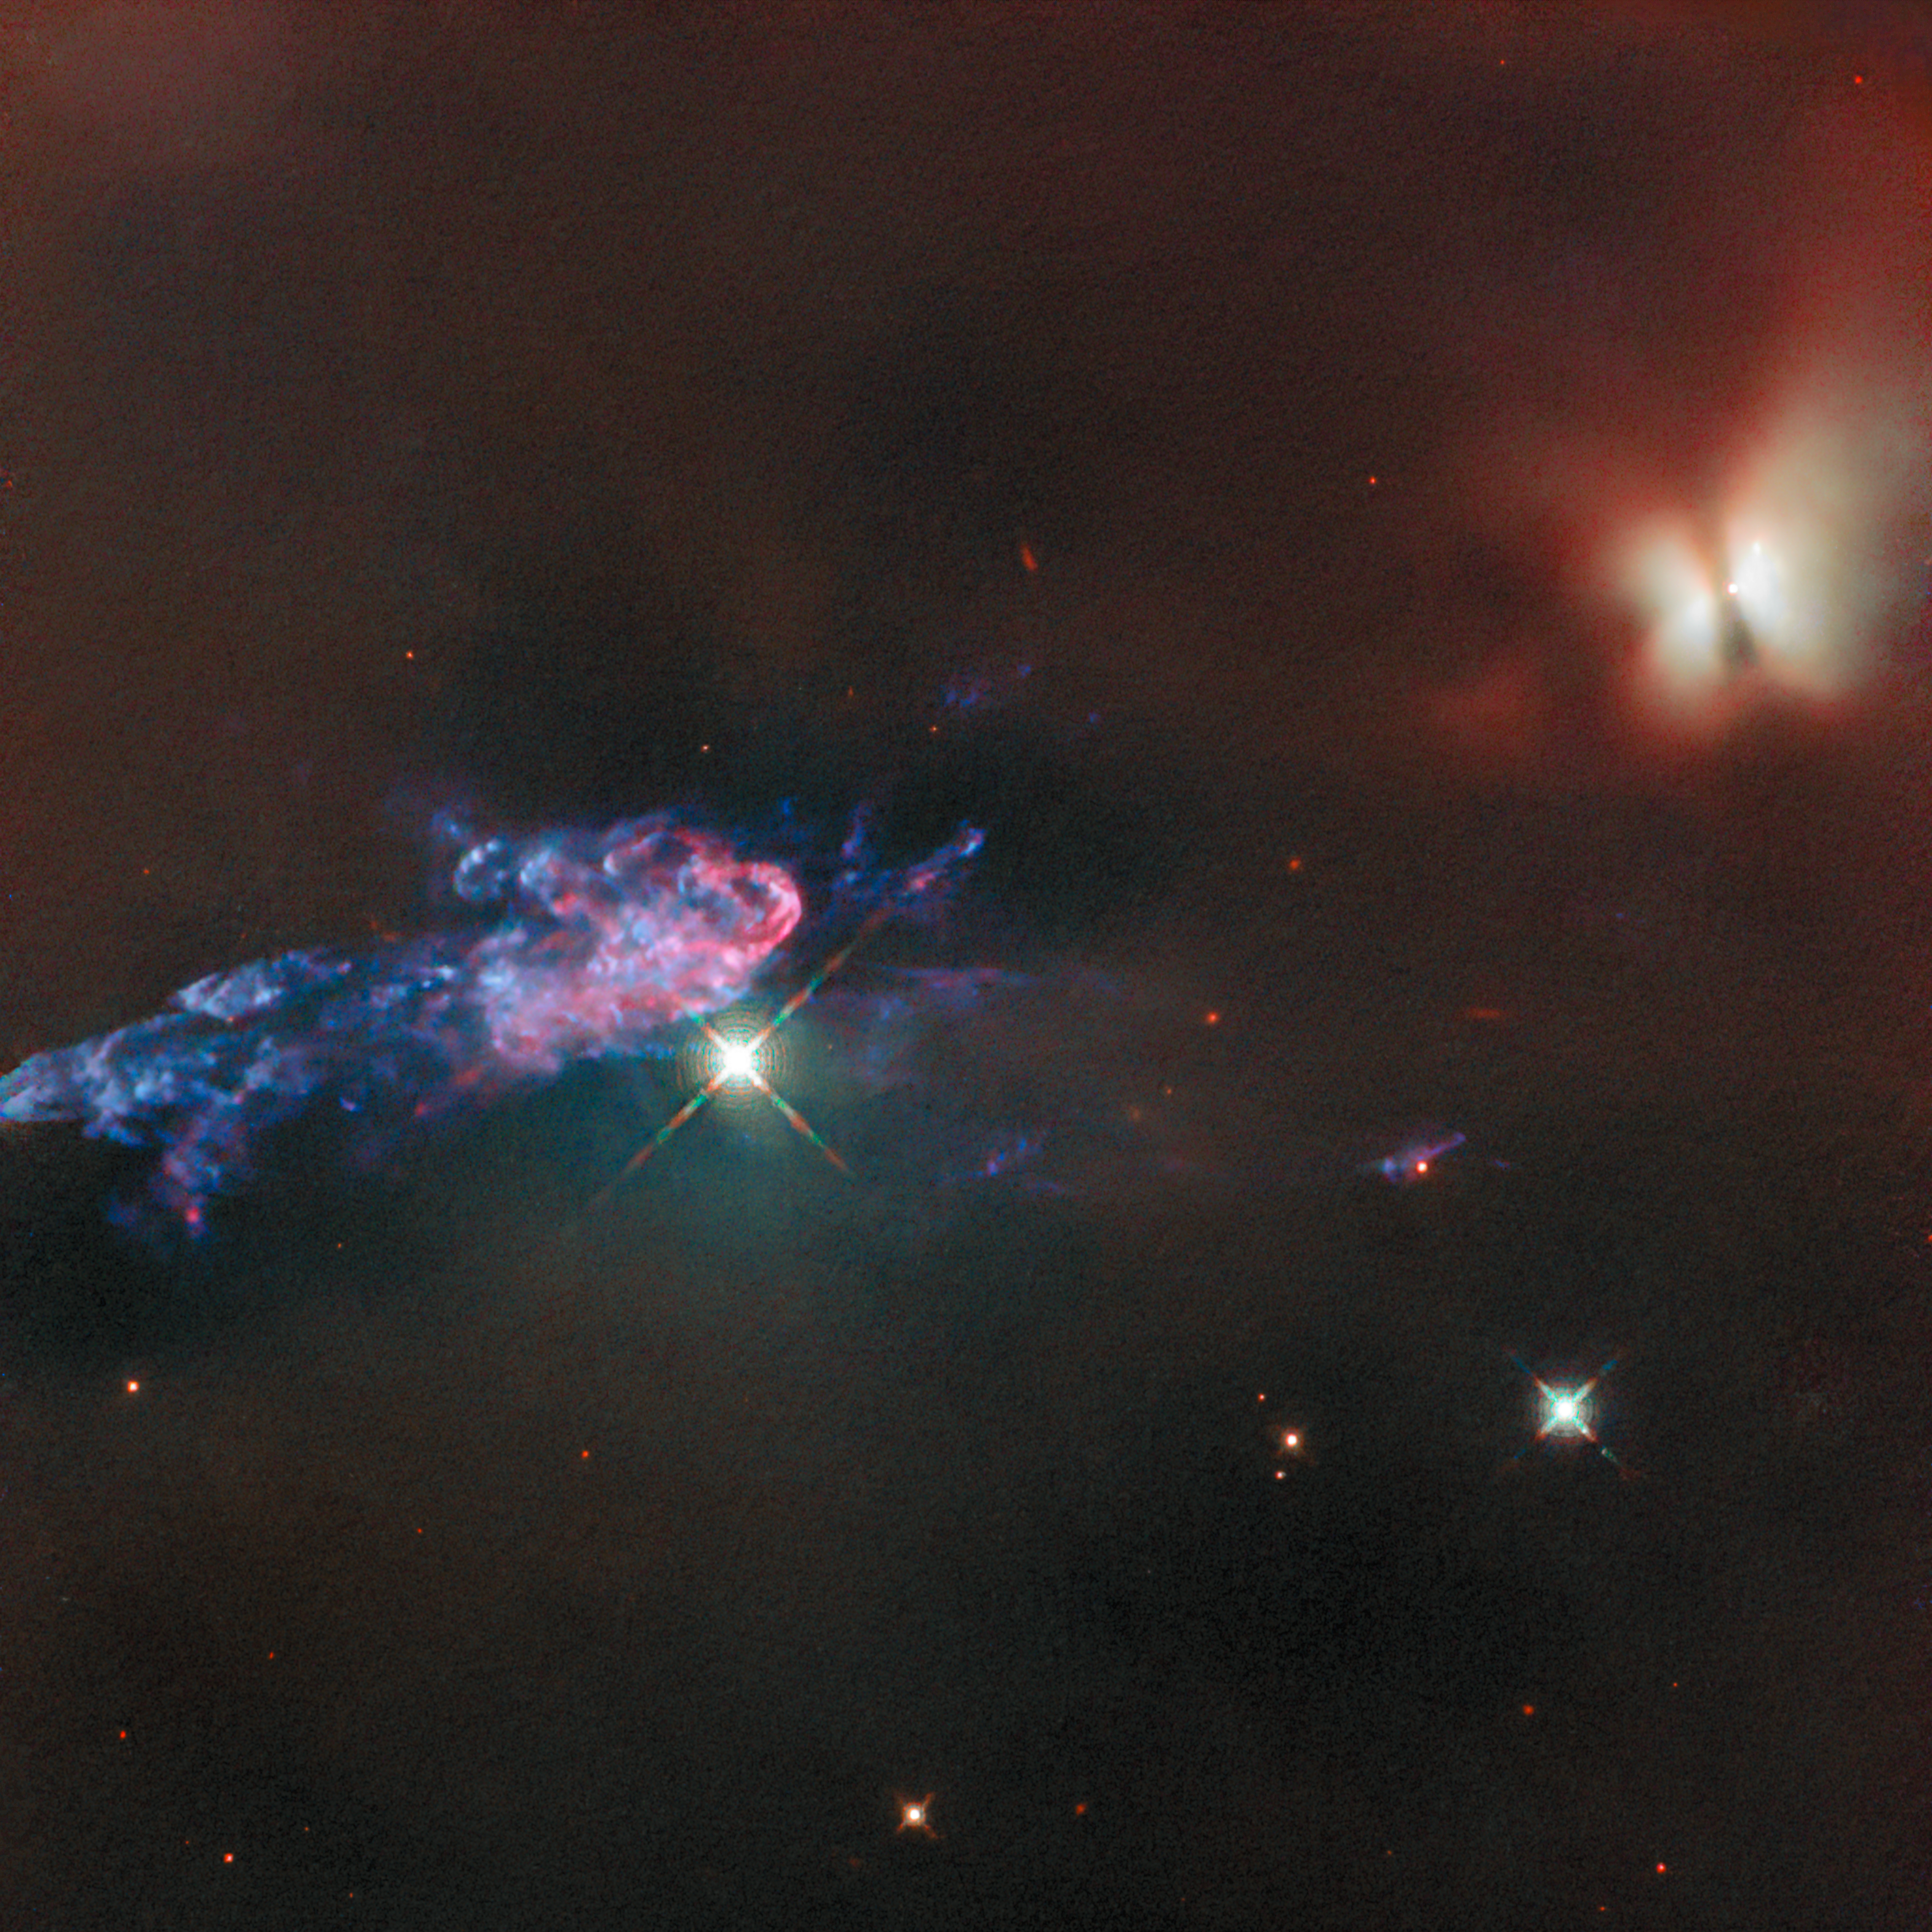

Jetting into space

Today’s NASA/ESA Hubble Space Telescope Picture of the Week peers into the dusty recesses of the nearest massive star-forming region to Earth, the Orion Nebula. Just 1300 light-years away, the Orion Nebula is visible to the naked eye below the three stars that form the ‘belt’ in the constellation Orion. The nebula is home to hundreds of newborn stars including the subject of this image: the protostars HOPS 150 and HOPS 153.

These protostars get their names from the Herschel Orion Protostar Survey, which was carried out with ESA’s Herschel Space Observatory. The object that can be seen in the upper-right corner of this image is HOPS 150: it’s a binary system, two young protostars orbiting each other. Each has a small, dusty disc of material surrounding it that it is feeding from. The dark line that cuts across the bright glow of these protostars is a cloud of gas and dust, over 2 000 times wider than the distance between Earth and the Sun, falling in on the pair of protostars. Based on the amount of infrared versus other wavelengths of light HOPS 150 is emitting, the protostars are mid-way down the path to becoming mature stars.

Extending across the left side of the image is a narrow, colourful outflow called a jet. This jet comes from the nearby protostar HOPS 153, out of frame. HOPS 153 is a significantly younger stellar object than its neighbour, still deeply embedded in its birth nebula and enshrouded by a cloud of cold, dense gas. While Hubble cannot penetrate this gas to see the protostar, the jet HOPS 153 has emitted is brightly visible as it plows into the surrounding gas and dust of the Orion Nebula.

The transition from tightly swaddled protostar to fully fledged star will dramatically affect HOPS 153’s surroundings. As gas falls onto the protostar, its jets spew material and energy into interstellar space, carving out bubbles and heating the gas. By stirring up and warming nearby gas, HOPS 153 may regulate the formation of new stars in its neighbourhood and even slow its own growth.

Credit: ESA/Hubble & NASA, T. Megeath